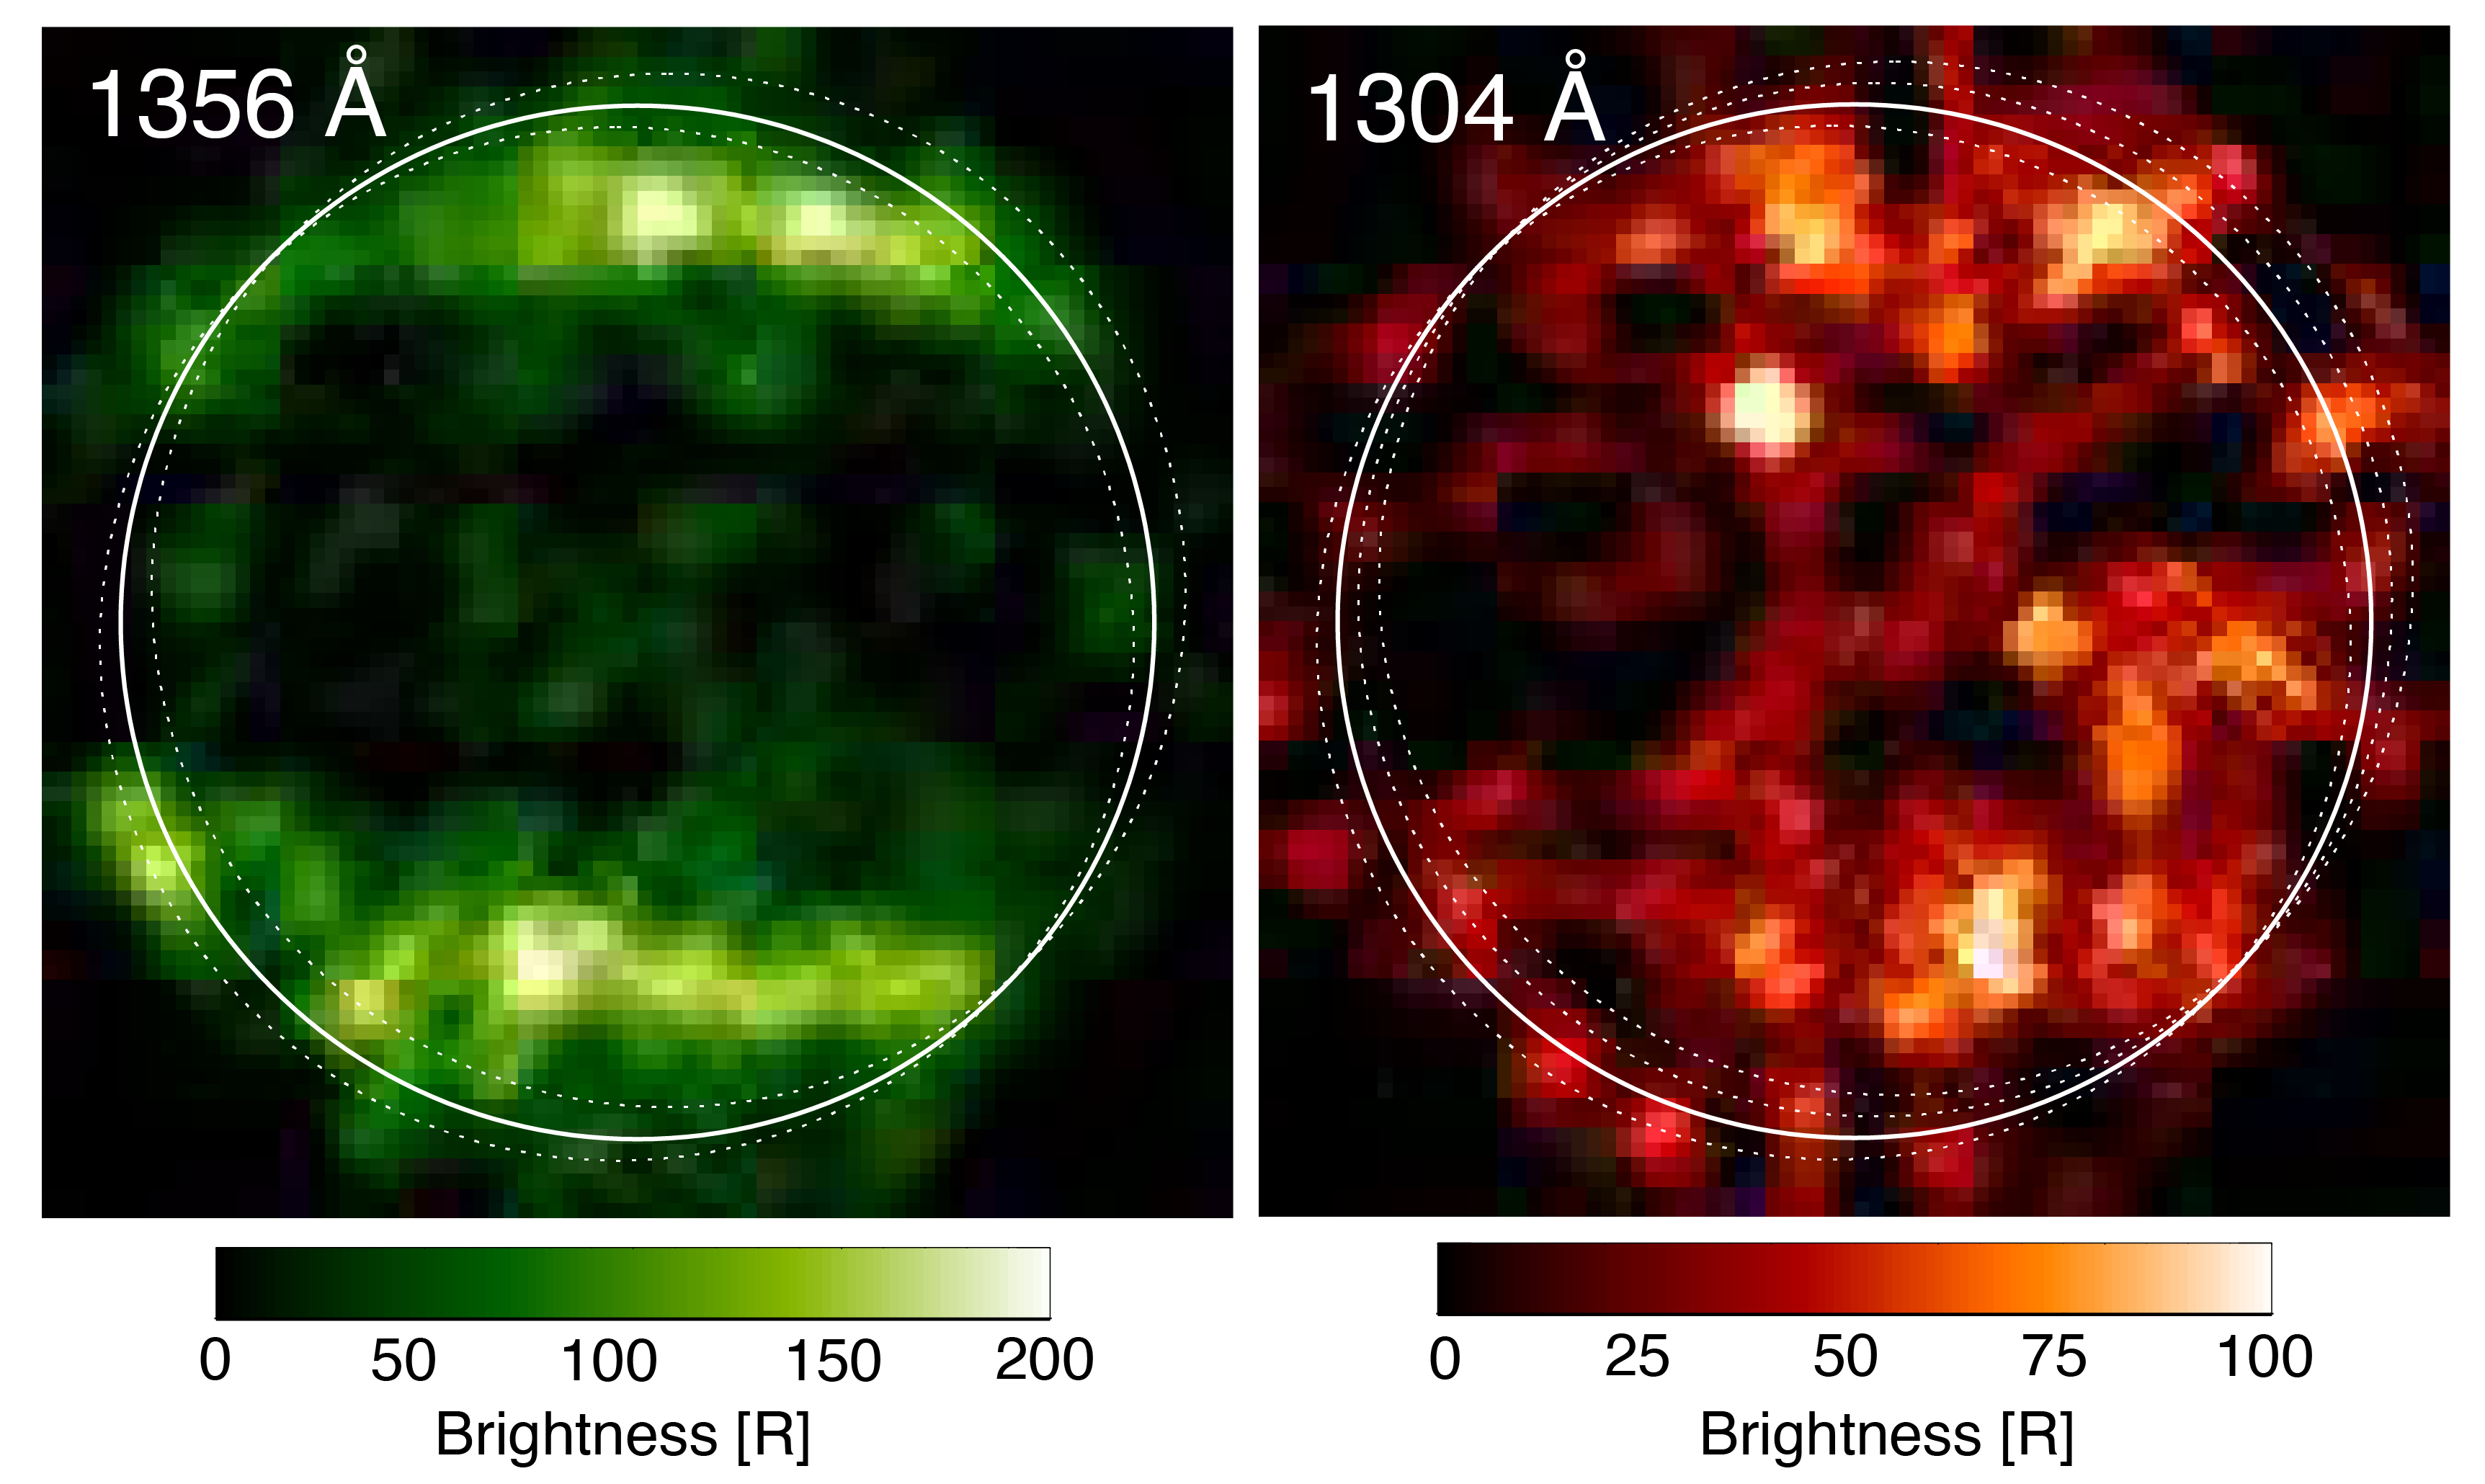

Hubble’s Ultraviolet Observations of Ganymede in 1998

In 1998, Hubble’s Space Telescope Imaging Spectrograph (STIS) took these first ultraviolet (UV) images of Ganymede, which revealed a particular pattern in the observed emissions from the moon’s atmosphere. The moon displays auroral bands that are somewhat similar to the auroral ovals observed on Earth and other planets with magnetic fields. This was an illustrative evidence for the fact that Ganymede has a permanent magnetic field. The similarities between the ultraviolet observations were explained by the presence of molecular oxygen, O2. The differences were explained at the time by the presence of atomic oxygen, O, which produces a signal that affects one UV color more than the other.

Credit: NASA/ESA/L.Roth